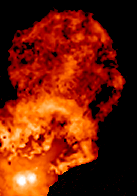

Binary Star XZ Tauri (Frame 3)

This is how XZ Tauri looked in 2000.

Credit: NASA, John Krist ( Space Telescope Science Institute), Karl Stapelfeldt (Jet Propulsion Laboratory), Jeff Hester (Arizona State University), Chris Burrows (European Space Agency/ Space Telescope Science Institute).